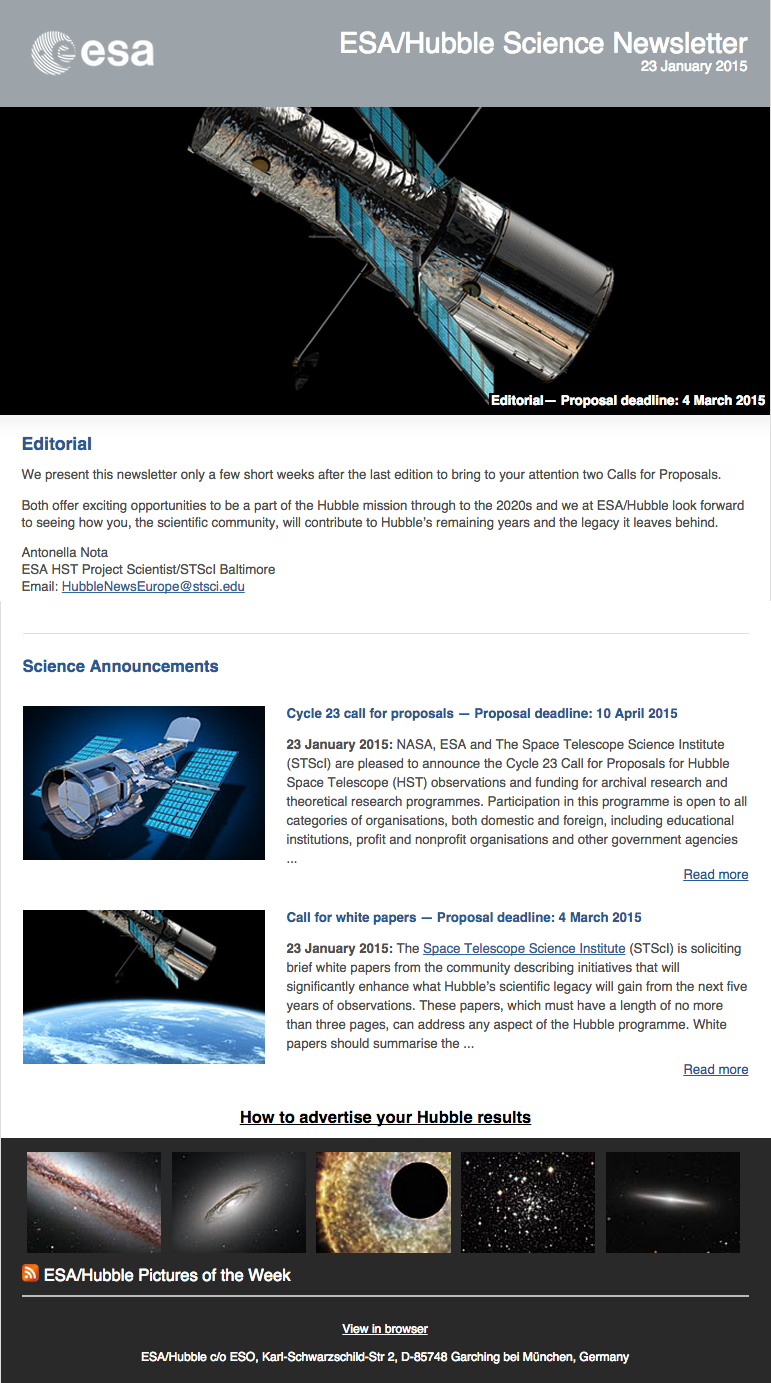

Screenshot of the January 2015 issue of ESA/Hubble Science Newsletter now available

Screenshot of the January 2015 issue of ESA/Hubble Science Newsletter

January 2014 edition of the ESA/Hubble Science Newsletter

Credit: NASA & ESA